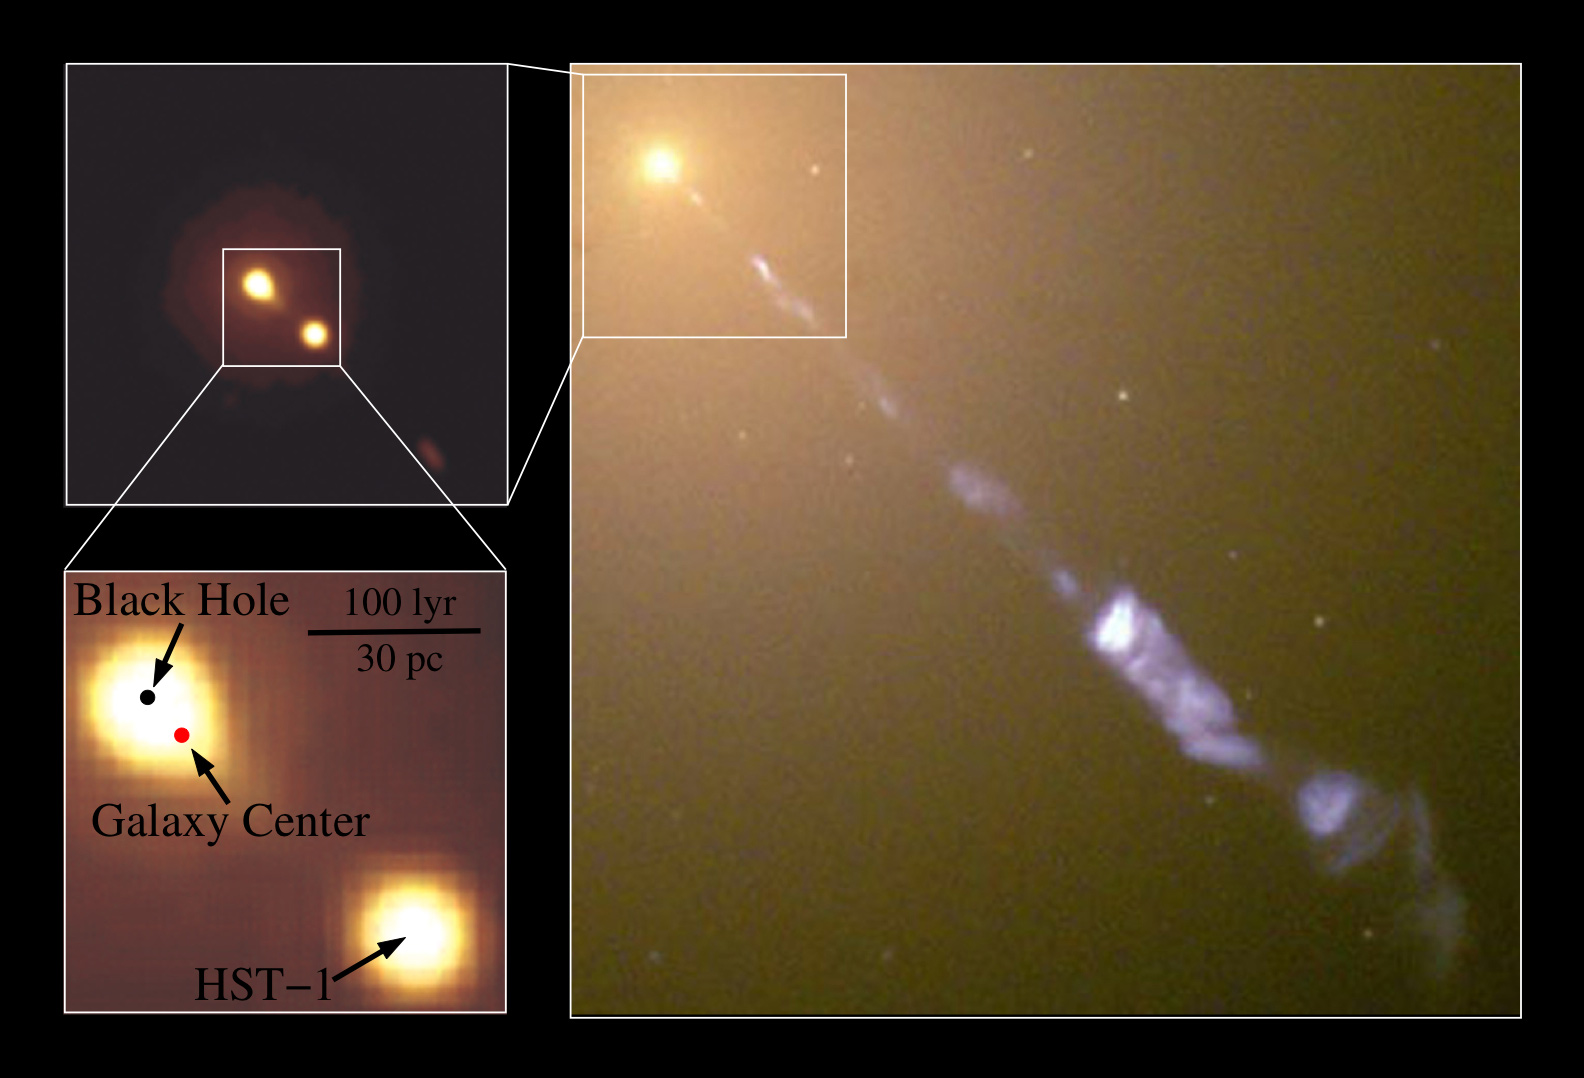

Images of M87

Astronomers find that the supermassive black hole at the centre of the most massive local galaxy (M87) is not where it was expected. Their research, conducted using the Hubble Space Telescope, concludes that the supermassive black hole in M87 is displaced from the galaxy centre.

At right is a large-scale image of galaxy M87 taken in 1998 with Hubble's Wide-Field Planetary Camera 2. The two images at left show an image taken in 2006 with Hubble's Advanced Camera for Surveys. The position of the supermassive black hole is indicated by the black dot in the lower left panel, and a knot in the jet (HST-1), which was flaring in 2006, is also indicated on this panel. The red dot indicates the centre of the galaxy's light distribution, which is offset from the position of the black hole by about 22 light-years.

Credit: NASA, ESA, D. Batcheldor and E. Perlman (Florida Institute of Technology), the Hubble Heritage Team (STScI/AURA), and J. Biretta, W. Sparks, and F.D. Macchetto (STScI)